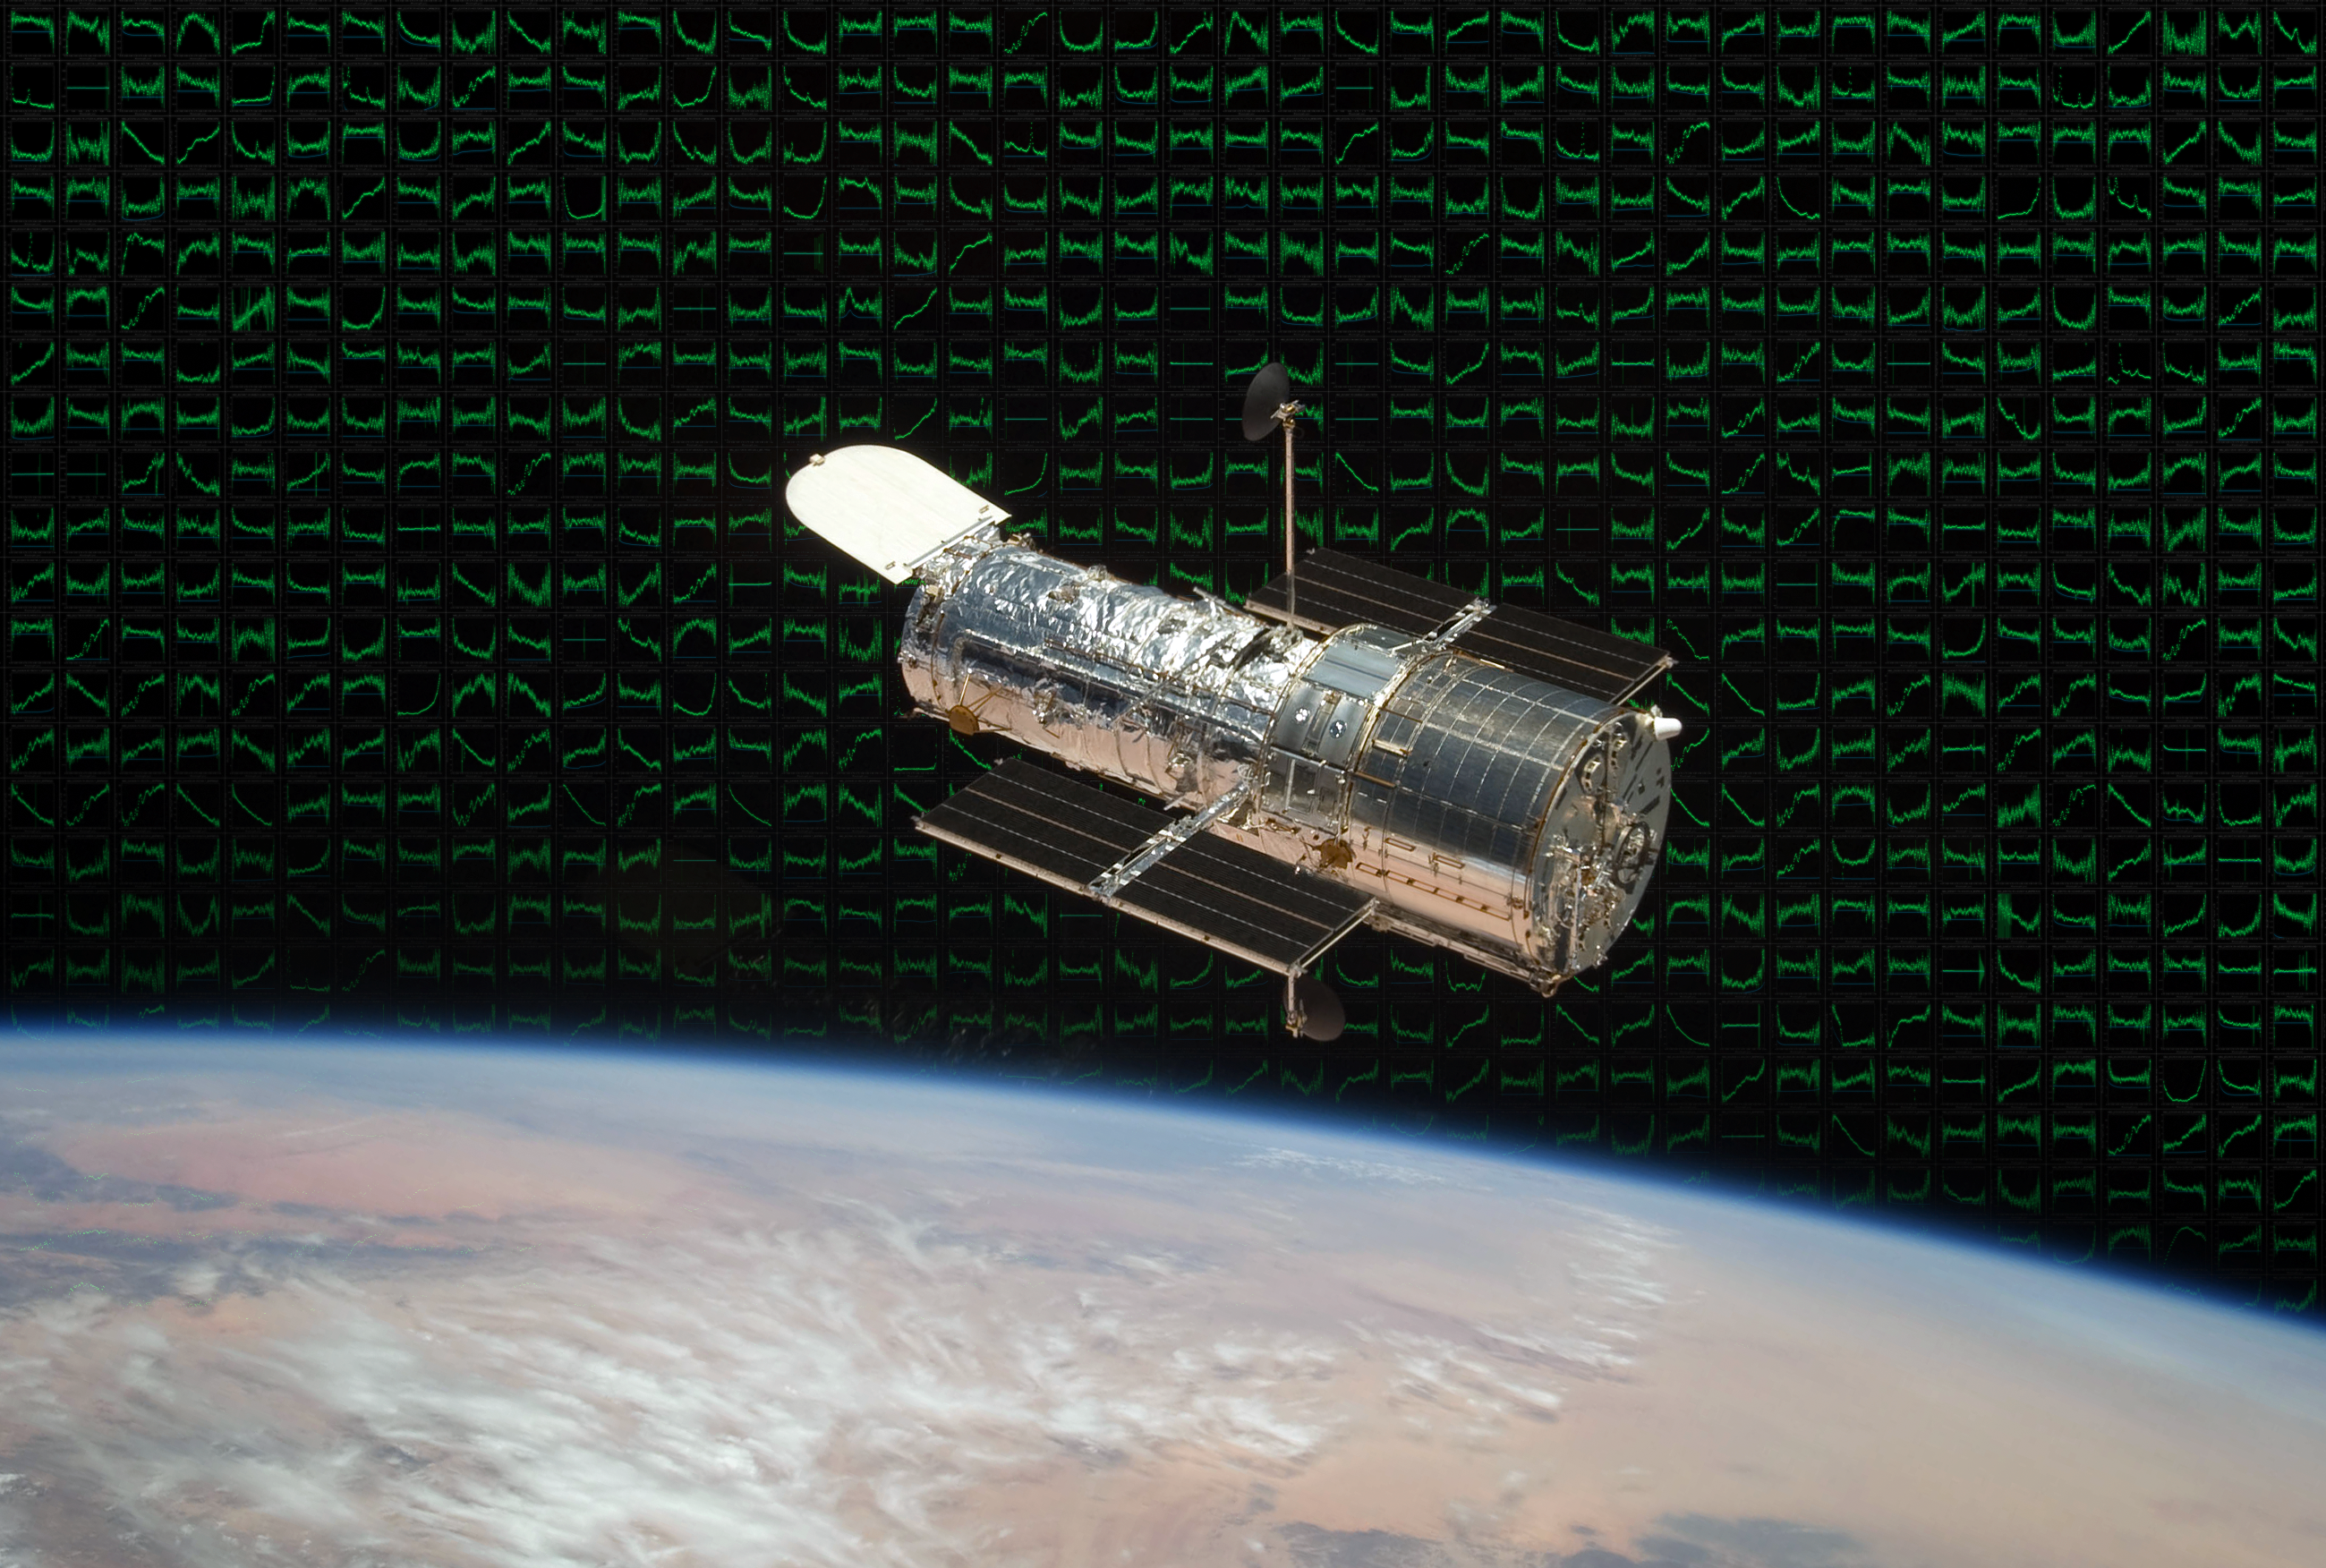

Hubble with spectra from the Space Telescope European Coordinating Facility

This image of Hubble is set against a background of hundreds of unique slitless spectra obtained by Hubble. The Space Telescope European Coordinating Facility (ST-ECF) was heavily involved in the development of slitless spectroscopy, which is used to study some of the faintest and most distant objects in the Universe. The ST-ECF is closing at the end of 2010, after 26 successful years.

Credit: ESA/ST-ECF and NASA